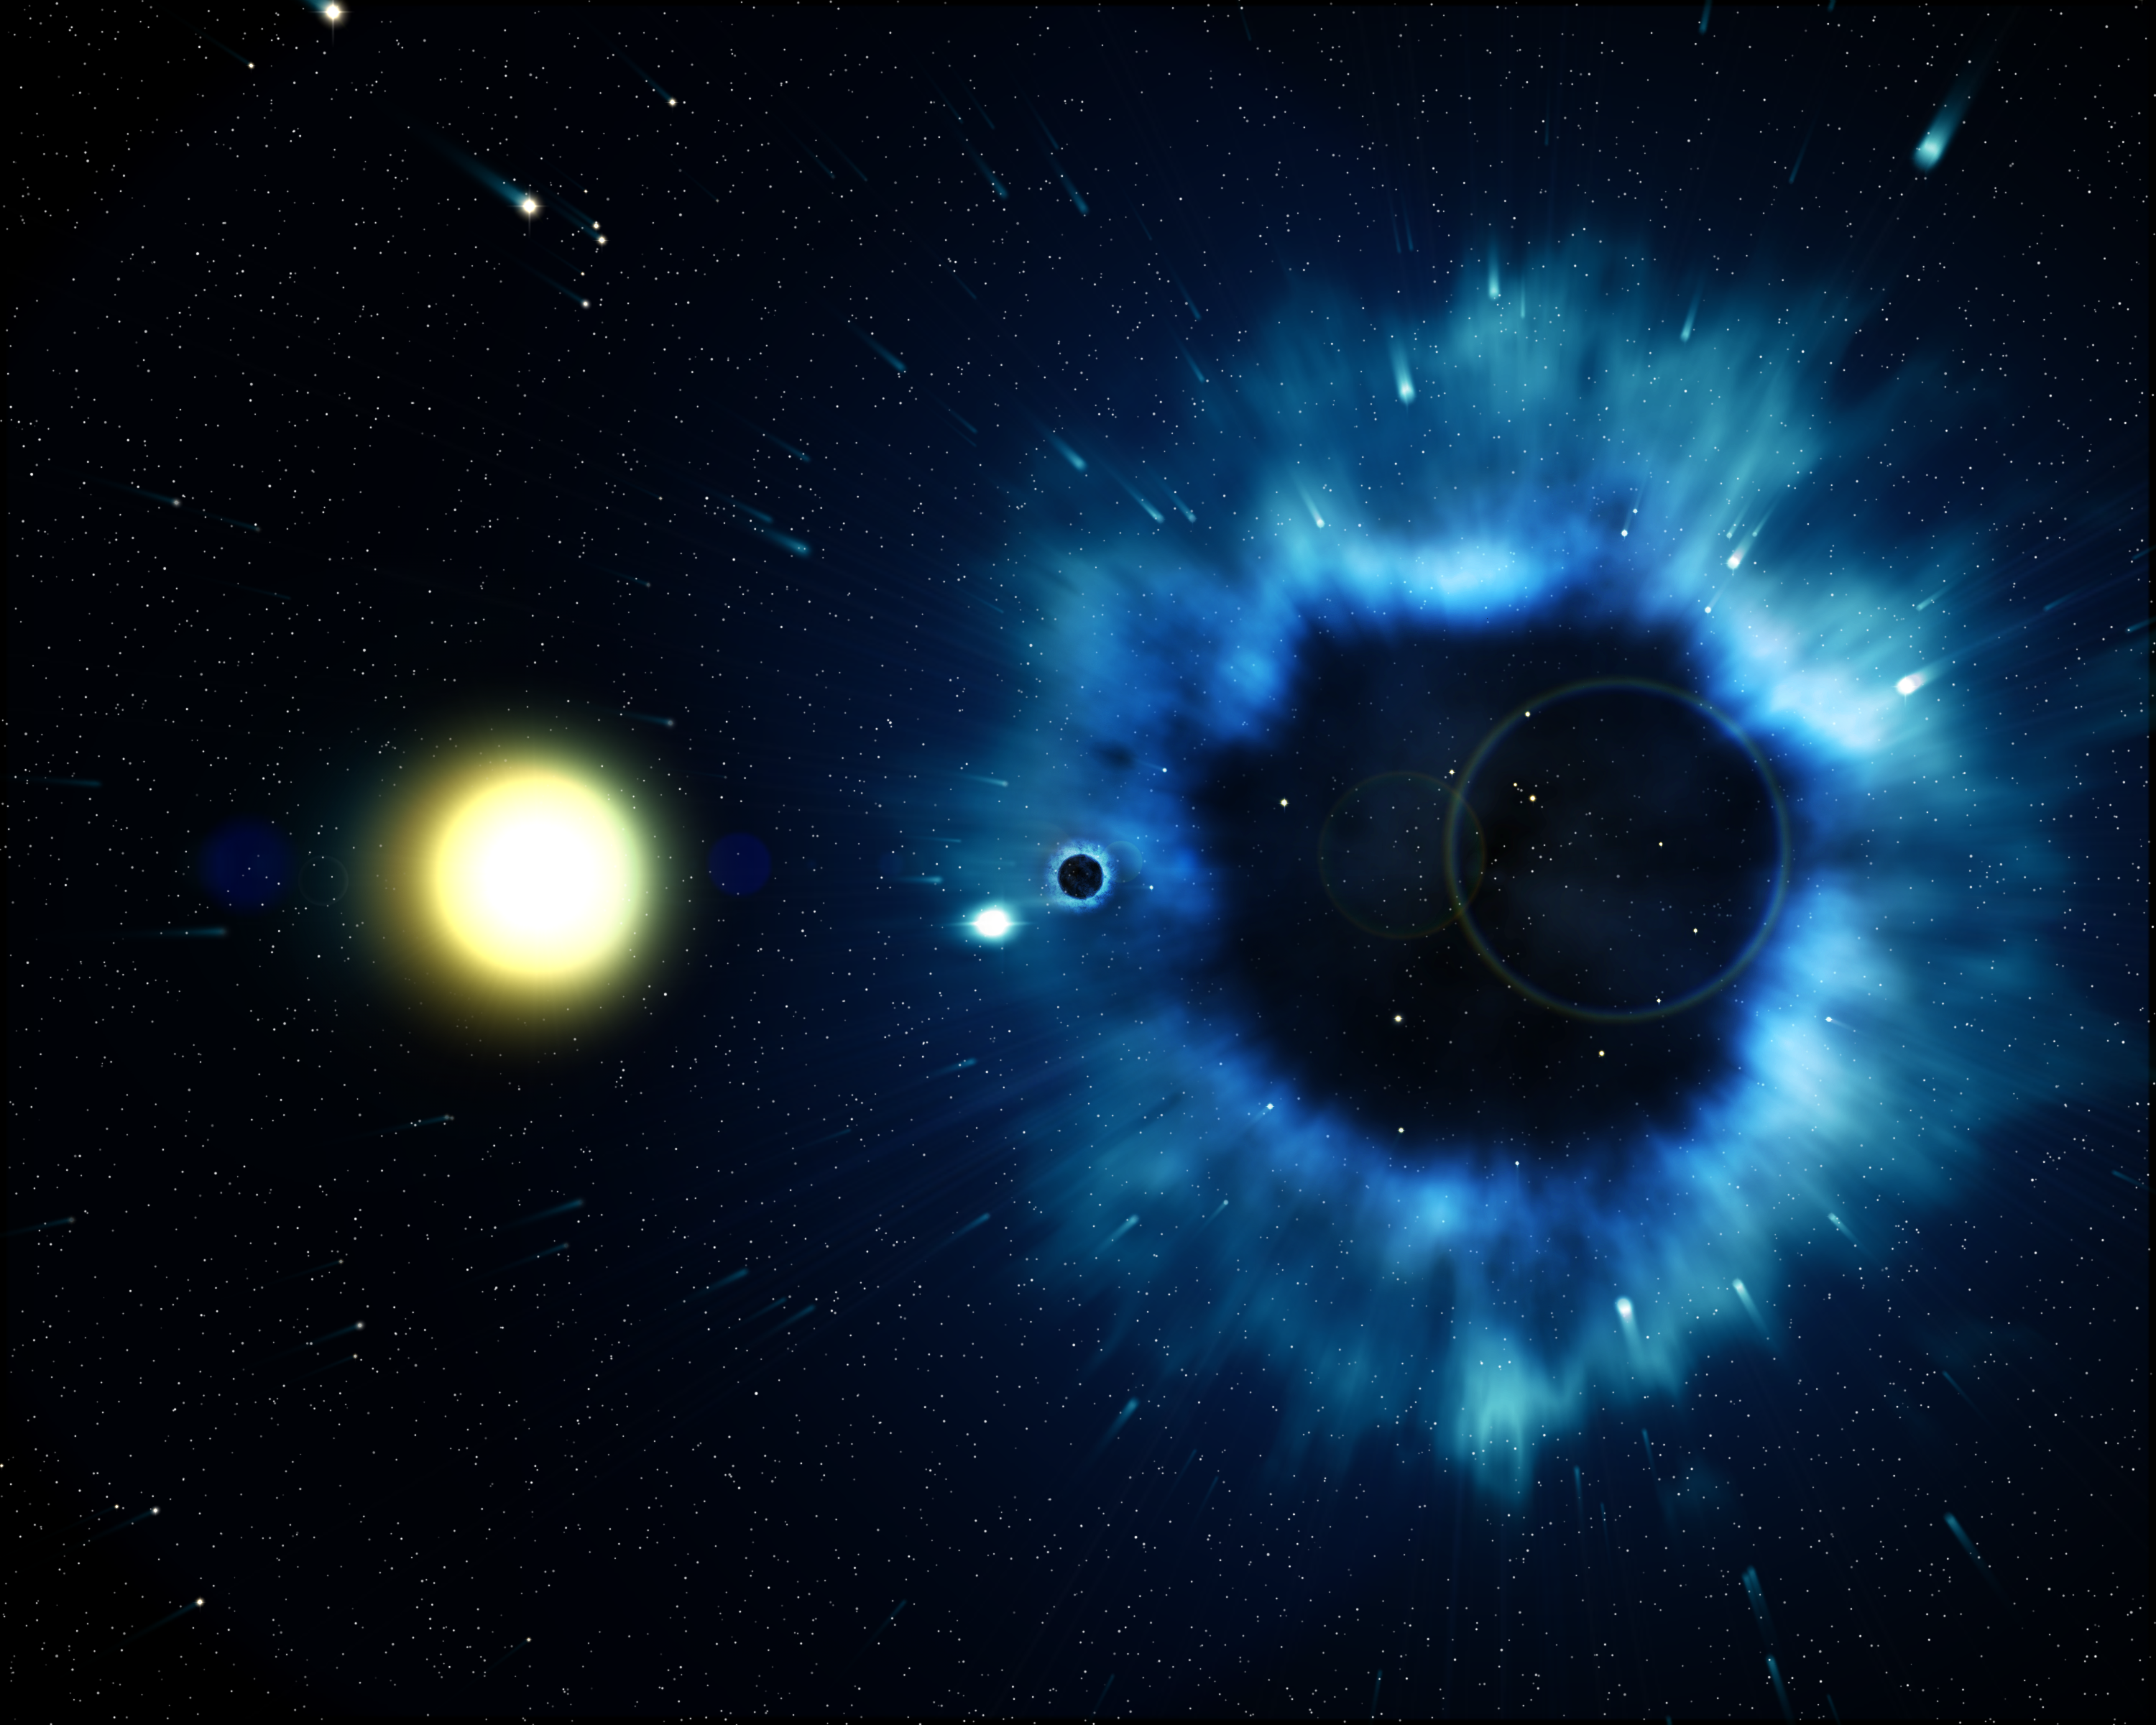

Missing link found between supernovae and black holes (artist's impression)

This artist's impression shows a black hole and its yellow companion star being sent out on a out on a long journey through the Milky Way galaxy by the explosive kick of a supernova - one of the Universe's most titanic events. New observations made by the ESA/NASA/ESA Hubble Space Telescope have allowed astronomers to measure the motion of this black hole system across the sky using images taken in 1995 and 2001. The results are surprising: the black hole streaks across the plane of our Milky Way at a velocity 4 times that of stars around it! This is the first direct link between black holes and the supernovae that create them.

Credit: European Space Agency, NASA and Felix Mirabel (the French Atomic Energy Commission & the Institute for Astronomy and Space Physics/Conicet of Argentina)